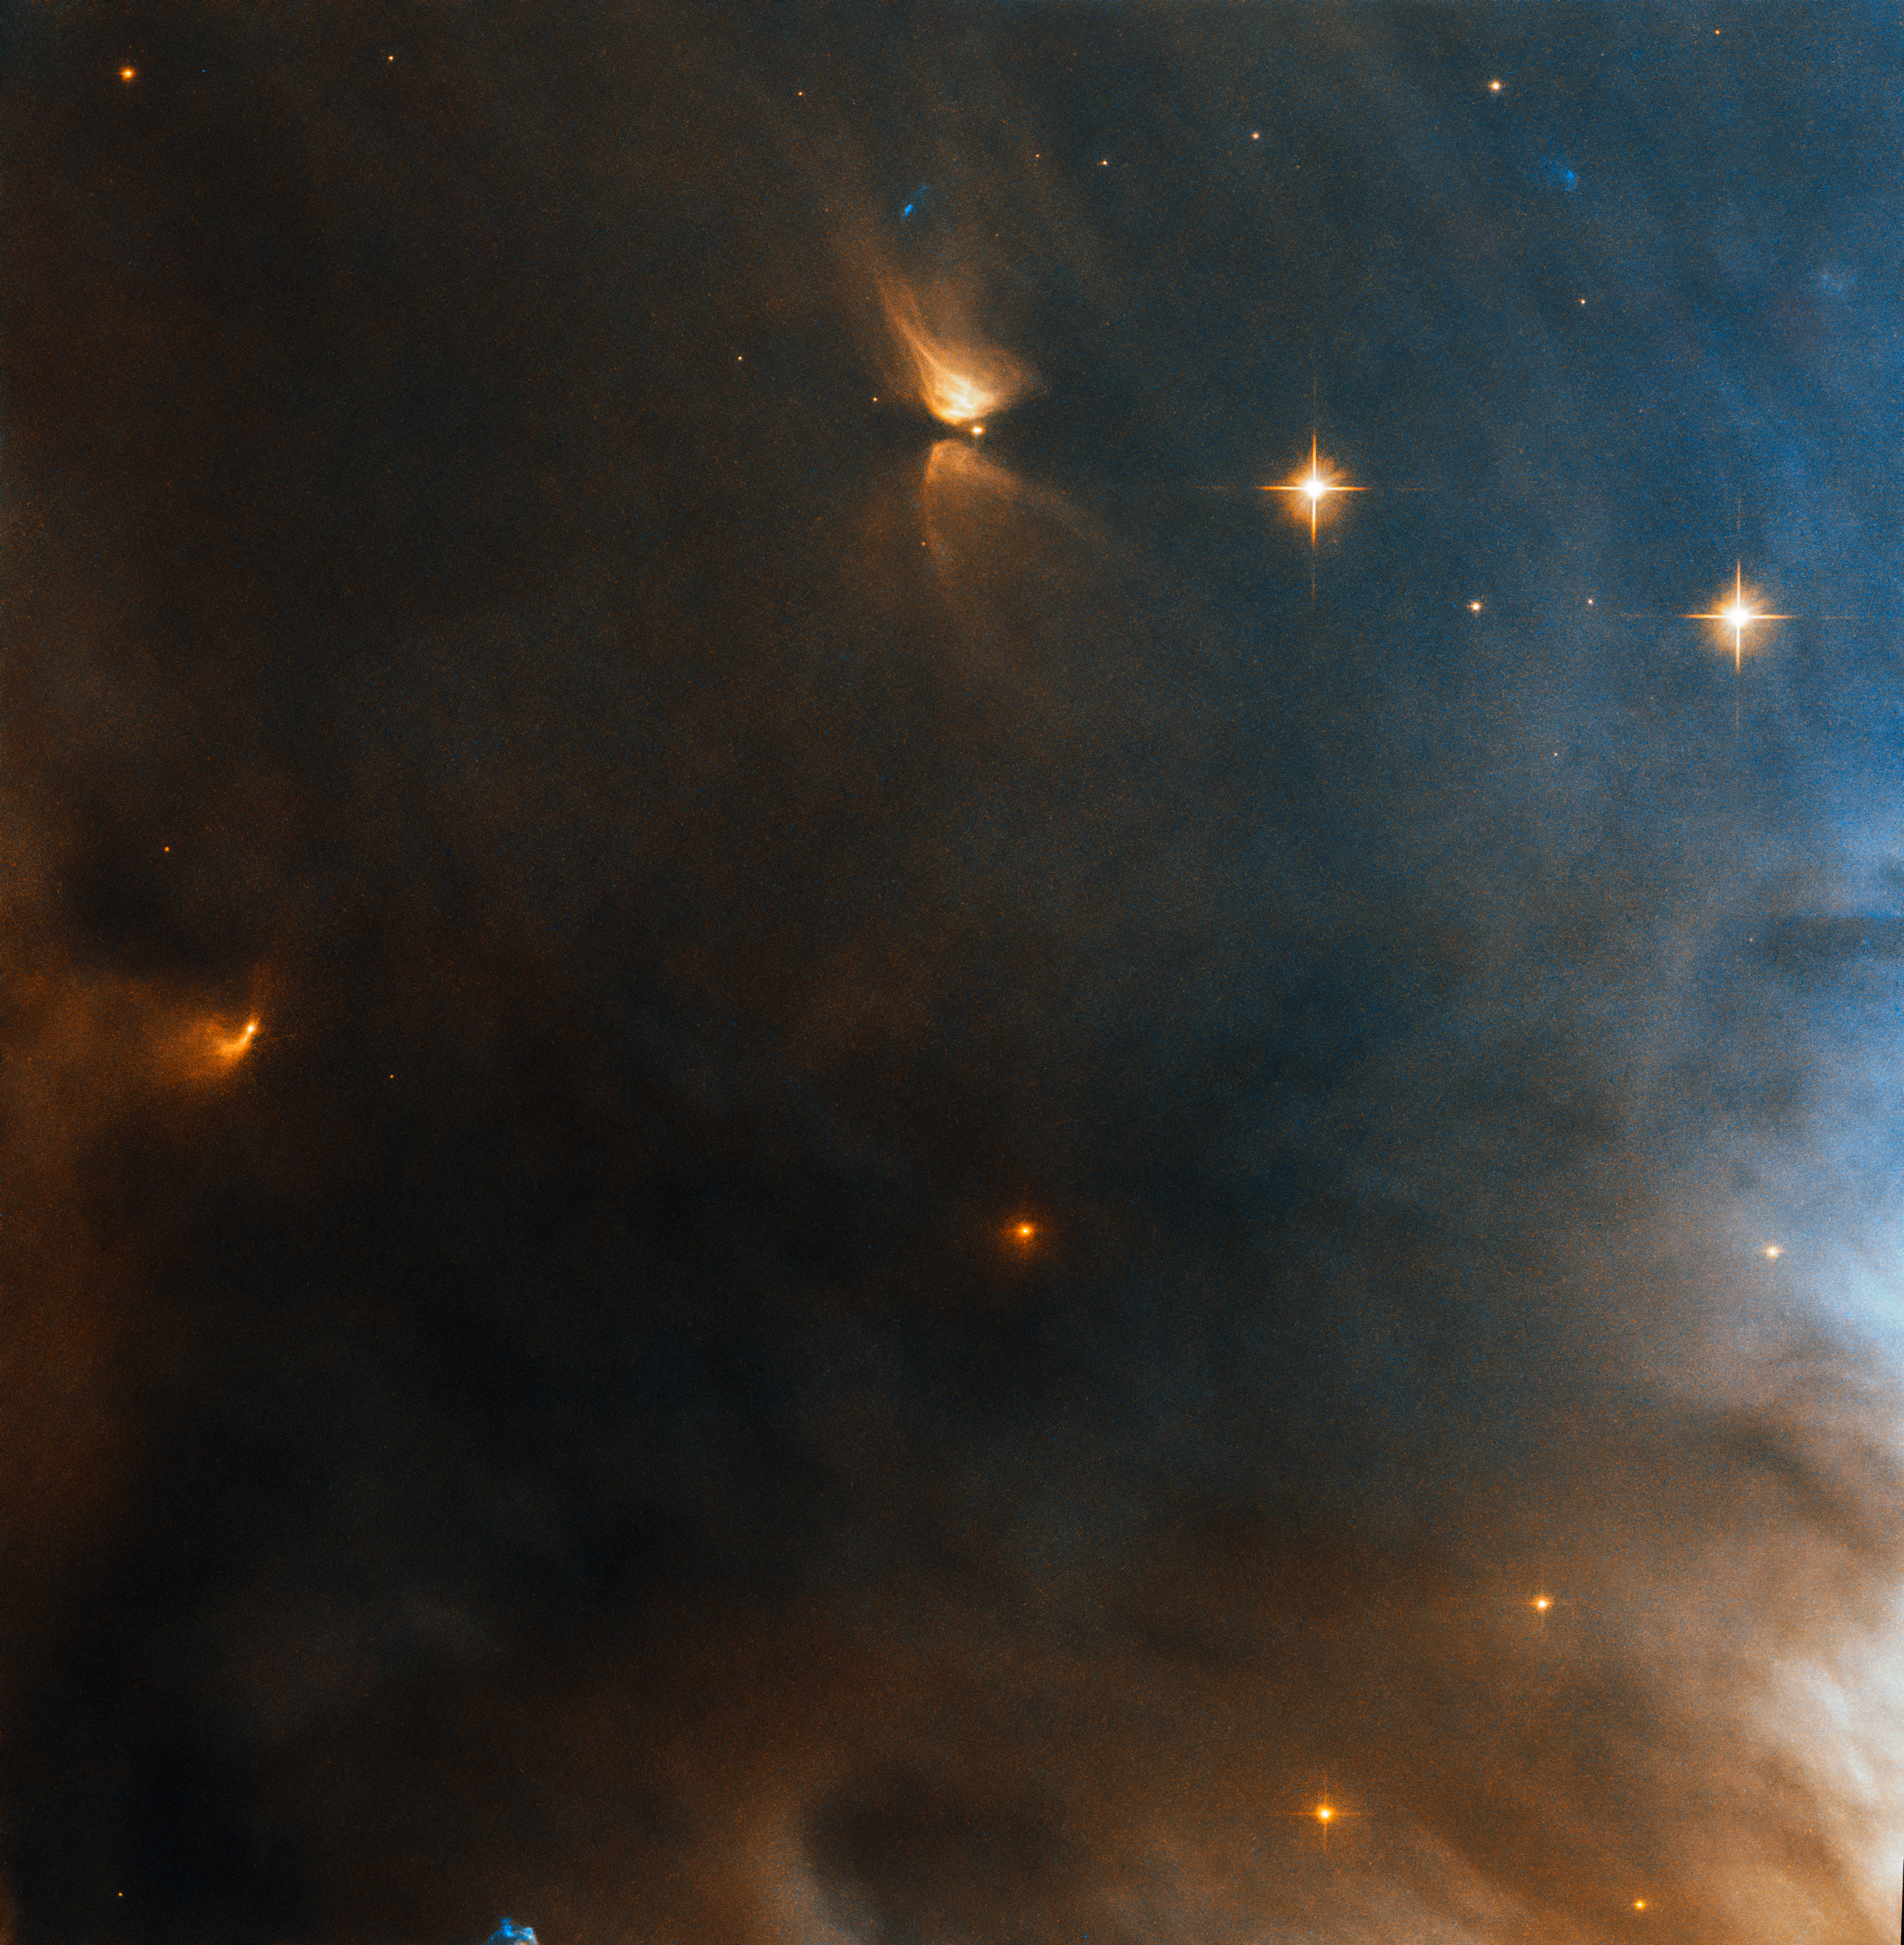

Champions League

Within a galaxy hosting around 300 billion stars, here the NASA/ESA Hubble Space Telescope has captured a mere handful or two — just about enough to form a single football team. These stellar “teammates” play under the banner of NGC 1333, the cloud of gas and dust which formed them and that they continue to call home.

NGC 1333 is located about 1000 light-years away in the constellation of Perseus (The Hero). The cool gas and dust concentrated in this region is generating new stars whose light is then reflecting off the surrounding material, lighting it up and making this object’s lingering presence known to us. NGC 1333 is accordingly classified as a reflection nebula.

This image shows just a single region of NGC 1333. Hubble has imaged NGC 1333 more widely before, revealing that the smattering of stars seen here has ample company. Seen in a broader context, this team of stars is but one gathering amongst many in NGC 1333’s celestial Champions League.

Credit: ESA/Hubble & NASA, K. Stapelfeldt